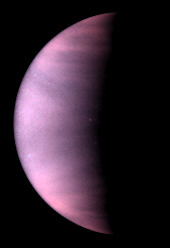

Venus cloud tops viewed by Hubble

This is a NASA/ESA Hubble Space Telescope ultraviolet-light image of theplanet Venus, taken on January 24 1995, when Venus was at a distance of 70.6 million miles (113.6 million kilometres) from Earth.

Venus is covered with clouds made of sulfuric acid, rather than thewater-vapor clouds found on Earth. These clouds permanently shroudVenus' volcanic surface, which has been radar mapped by spacecraft and from Earth-based telescope.

Credit: L. Esposito (University of Colorado, Boulder), and NASA/ESA